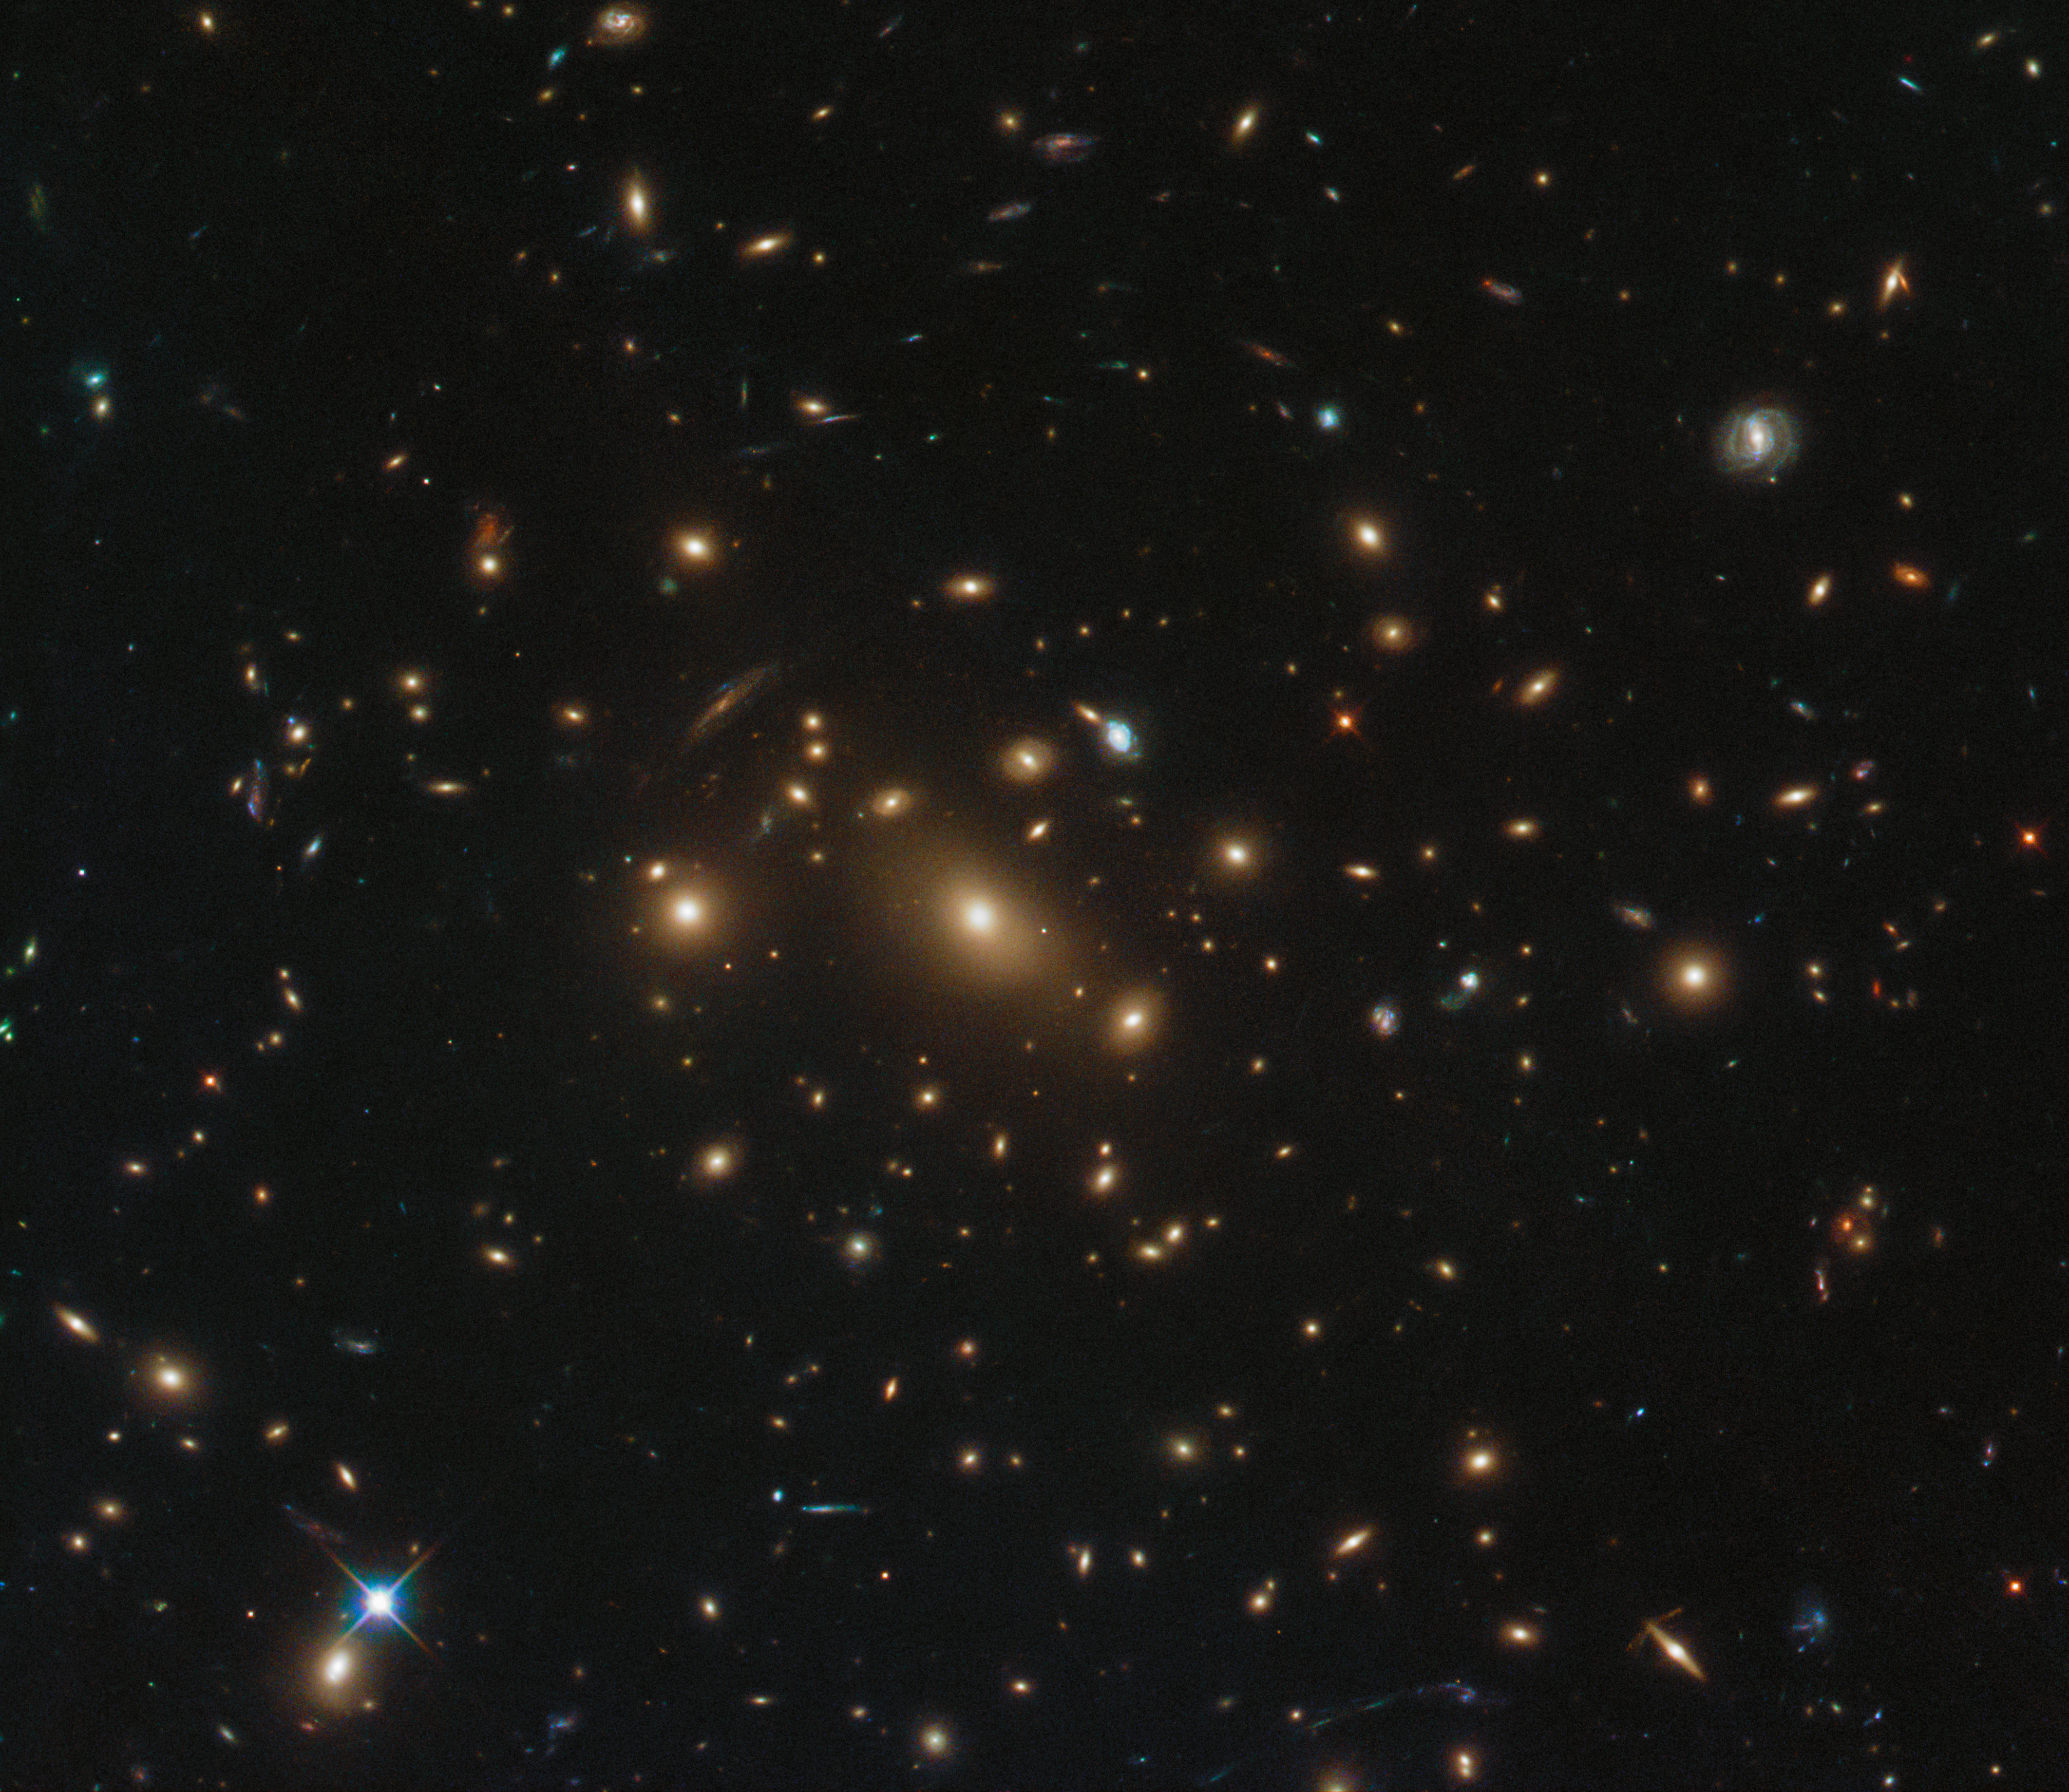

One galaxy, three supernovae

In astronomy, the devil is in the details — as this image, taken by the NASA/ESA Hubble Space Telescope’s Advanced Camera for Surveys and Wide-Field Camera 3, demonstrates.

The numerous fuzzy blobs and glowing shapes scattered across this image make up a galaxy cluster named RXC J0949.8+1707. Located to the upper right of the frame sits an especially beautiful and interesting barred spiral galaxy, seen face-on. In the past decade, astronomers peering at this galaxy have possibly discovered not one but three examples of a cosmic phenomenon known as a supernova, the magnificently bright explosion of a star nearing the end of its life.

The newest supernova candidate is nicknamed SN Antikythera, and can be seen to the lower right of the host galaxy. This shone brightly in visible and infrared light over a number of years before fading slightly. The two other supernovae, nicknamed SN Eleanor and SN Alexander, were present in data collected in 2011 but are not visible in this image, which was taken a few years later — their temporary nature unambiguously confirmed their status as supernovae. If future observations of RXC J0949.8+1707 show SN Antikythera to have disappeared then we can most likely label it a supernova, as with its two older (and now absent from the images) siblings.

This image was taken as part of an observing programme called RELICS (Reionization Lensing Cluster Survey). RELICS imaged 41 massive galaxy clusters with the aim of finding the brightest distant galaxies for the forthcoming NASA/ESA/CSA James Webb Space Telescope (JWST) to study.

Credit: ESA/Hubble & NASA, RELICS